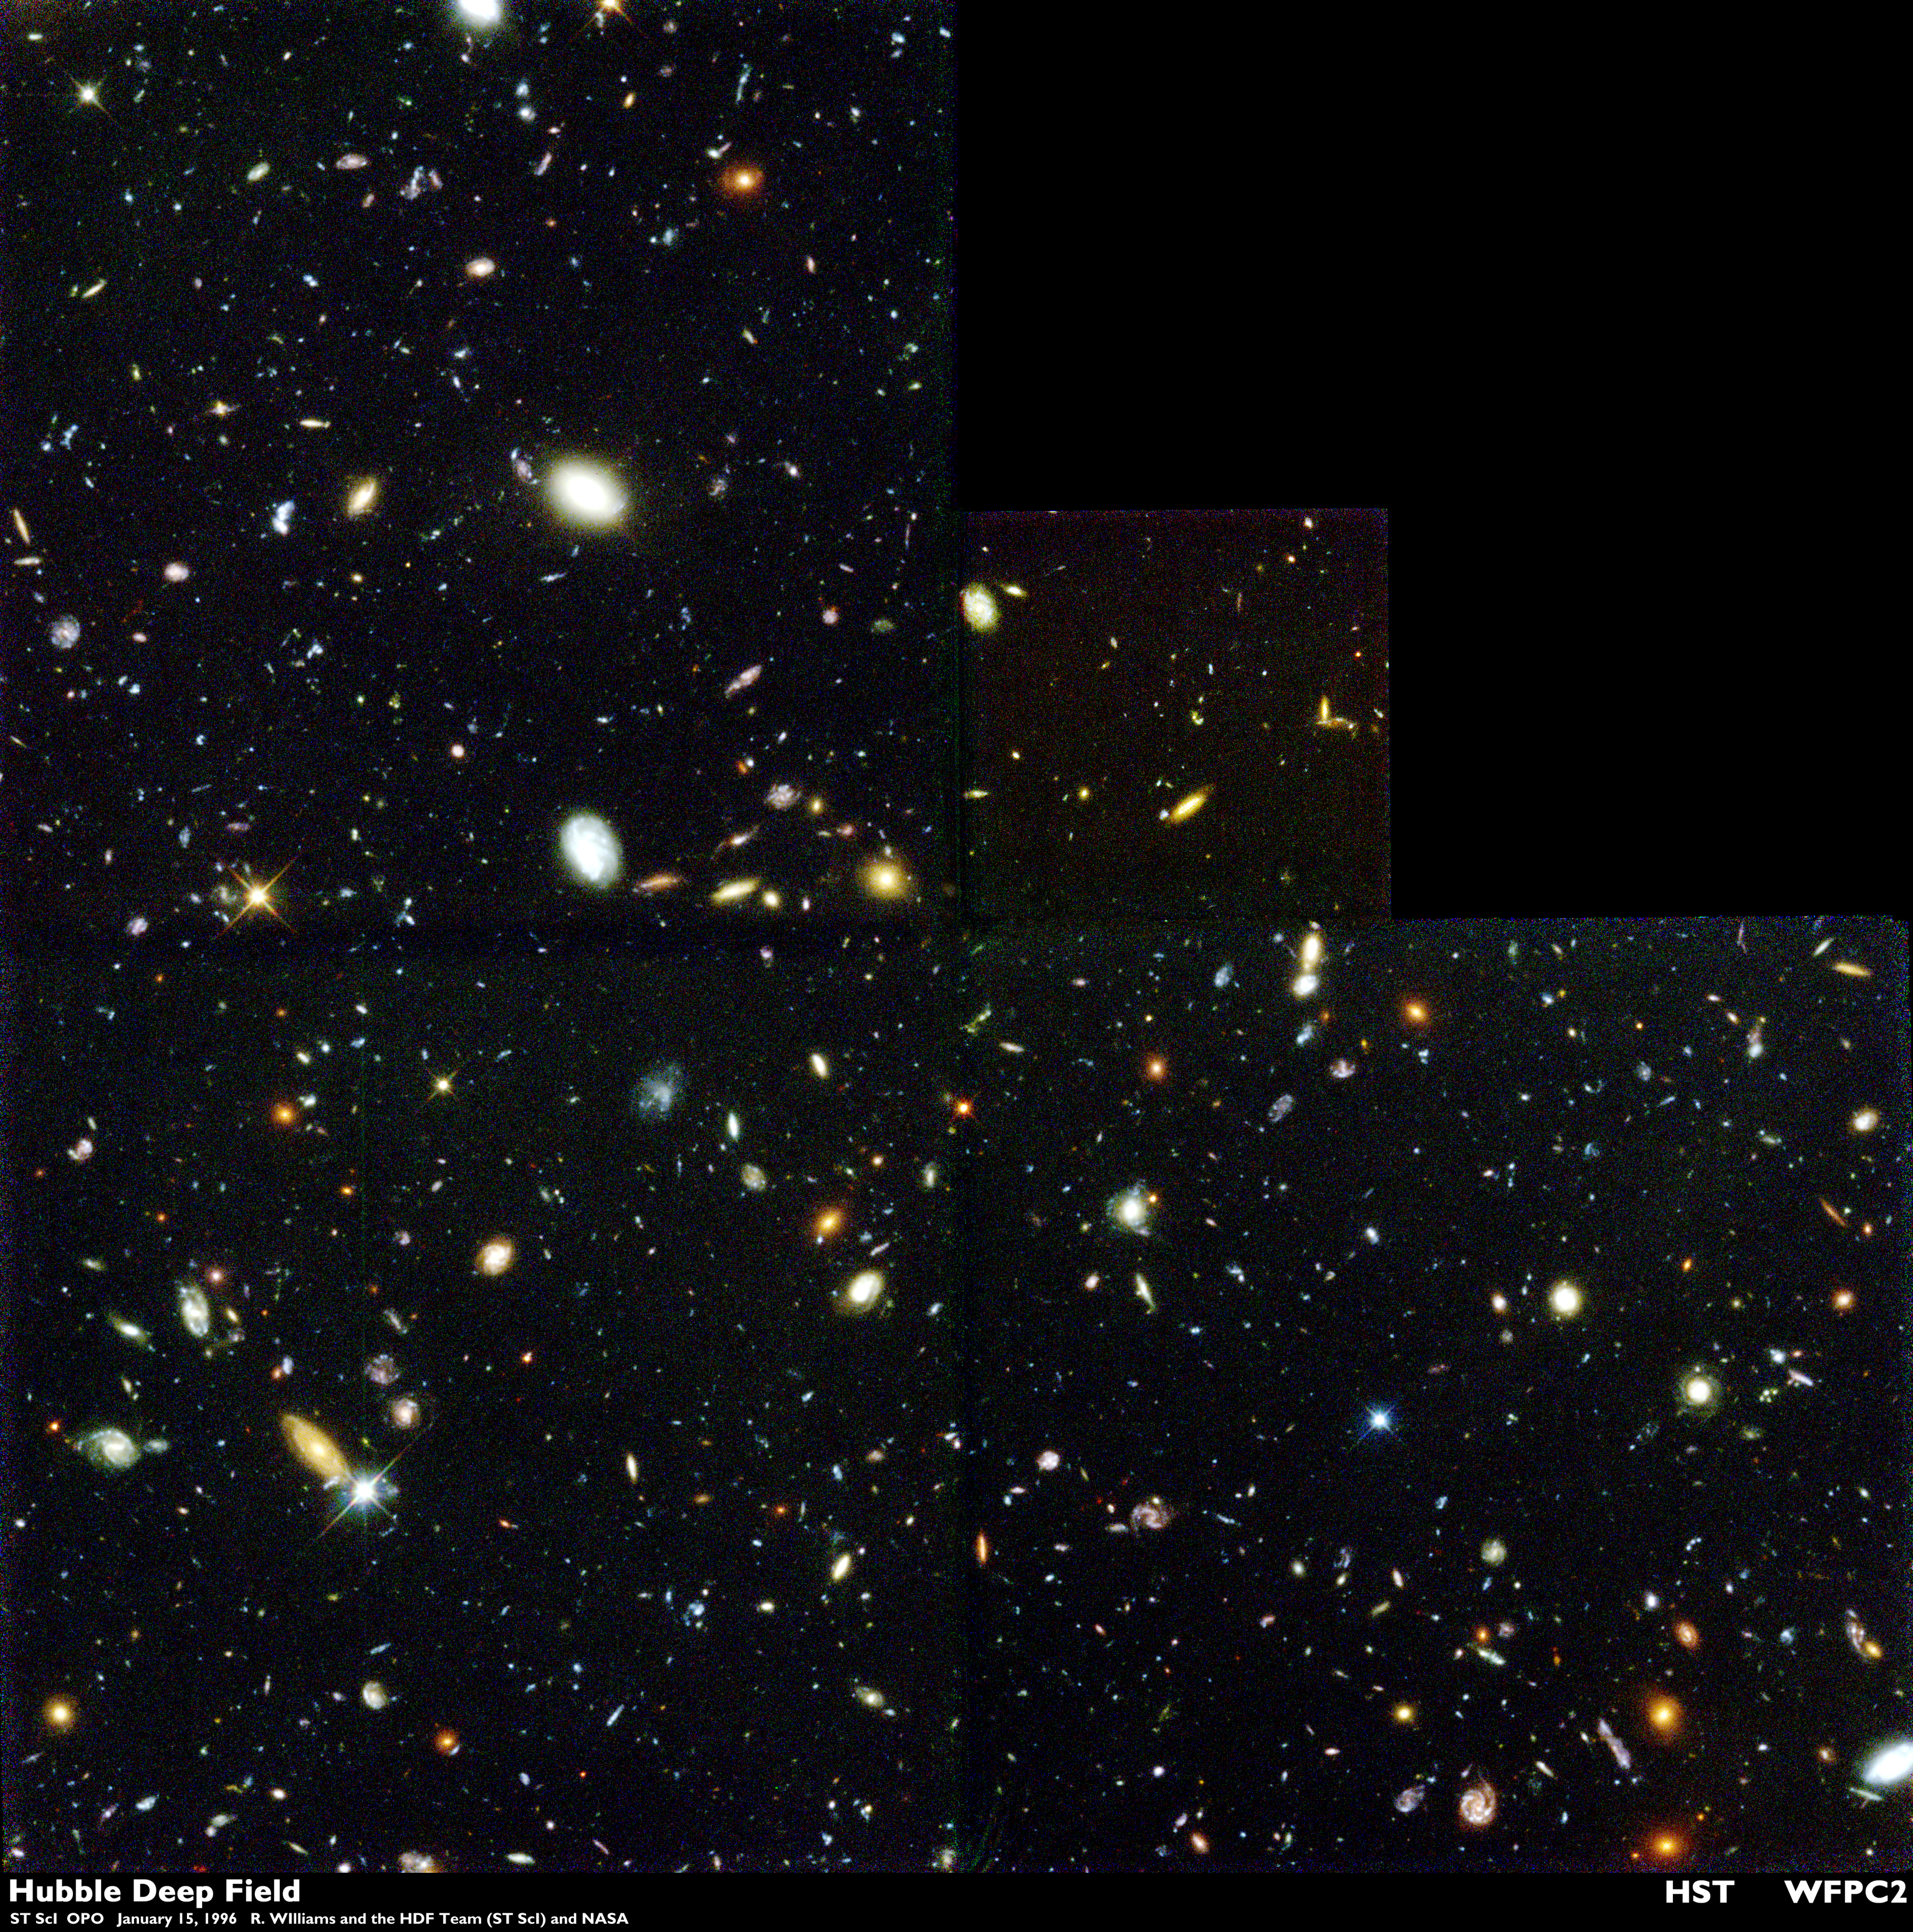

Full WFPC2 Mosaic - Full Resolution

One peek into a small part of the sky, one giant leap back in time. NASA's Hubble Space Telescope provided one of the deepest, most detailed visible views of the universe. Representing a narrow "keyhole" view stretching to the visible horizon of the universe, the Hubble Deep Field image covers a speck of the sky only about the width of a dime 75 feet away. The field is a very small sample of the heavens but it is considered representative of the typical distribution of galaxies in space. In this small field, Hubble uncovered a bewildering assortment of at least 1,500 galaxies at various stages of evolution.

Credit: R. Williams (STScI), the Hubble Deep Field Team and NASA/ESA